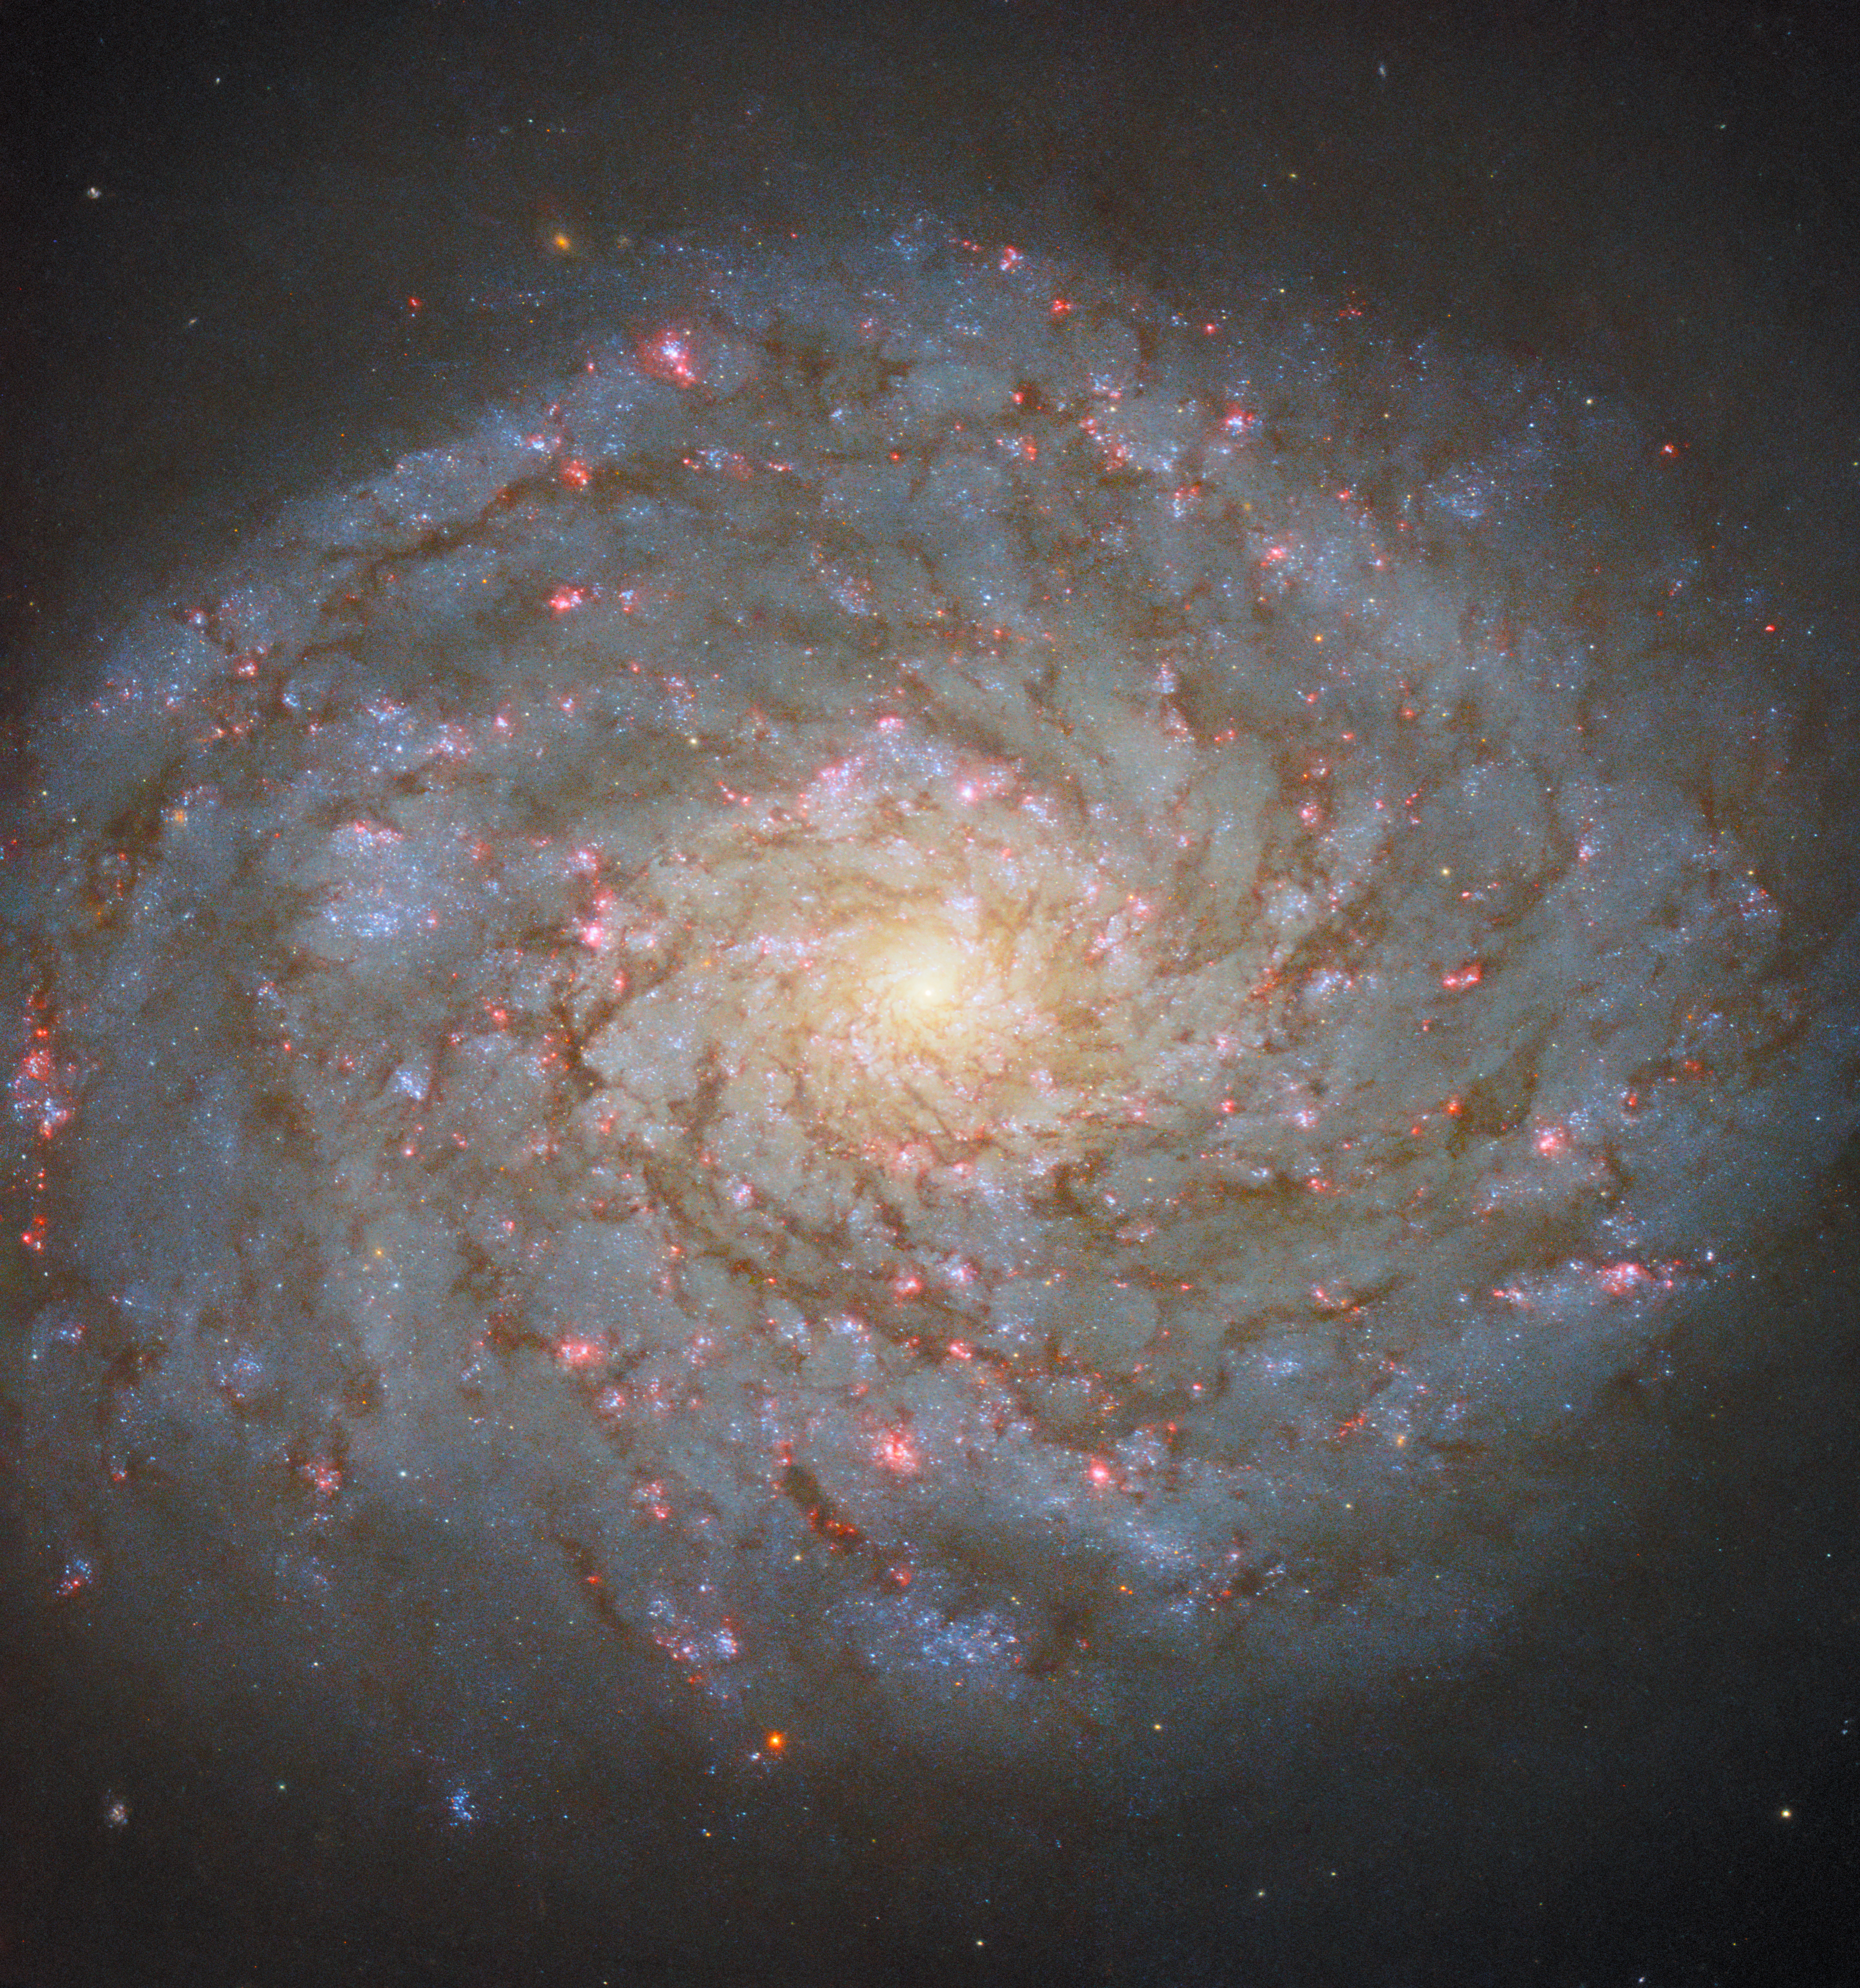

A jewel in the queen’s hair

This Picture of the Week shows the jewel-bright spiral galaxy NGC 4689, which lies 54 million light-years from Earth in the constellation Coma Berenices. This constellation has the distinction of being the only one of the 88 constellations officially recognised by the International Astronomical Union (IAU) to be named after an historical figure, Queen Berenice II of Egypt. The latin word ‘coma’ references her hair, meaning that NGC 4689 can be said to be found in the hair of a queen. Some people of Berenice’s time would have meant this quite literally, as the story goes that her court astronomer thought that a missing lock of Berenice’s hair had been catasterised (a word meaning ‘placed amongst the stars’) by the gods: hence the name of the constellation, Coma Berenices.

NGC 4689 holds an interesting — albeit less royal — place in modern astronomy too. The Universe is so incredibly vast that at a distance of a mere 54 million light-years NGC 4689 is relatively nearby for a galaxy. This image has been made using data from two sets of observations, one made in 2019 and 2024, both of which were made as a part of programmes that observed multiple ‘nearby’ galaxies. The 2024 observing programme is an interesting example of how Hubble — a relatively old but extraordinarily productive telescope — can support the work of the technologically cutting-edge Webb telescope. Observations collected by Webb stand to transform our understanding of how galaxies transform and evolve over time, by providing data of an unprecedented level of detail and clarity. However, thanks to their complementary capabilities, new observations from Hubble — such as those used to create this image — can assist the work done using Webb. In this case, the Hubble data were collected in order to get a more accurate grasp of the stellar populations of nearby galaxies, which is crucial to understanding the evolution of galaxies. Thus, NGC 4689 is playing an important role in developing our understanding of how all galaxies evolve. In fact, it is observed enough that it has been the subject of a Hubble Picture of the Week before, in 2020.

Credit: ESA/Hubble & NASA, D. Thilker, J. Lee and the PHANGS-HST Team